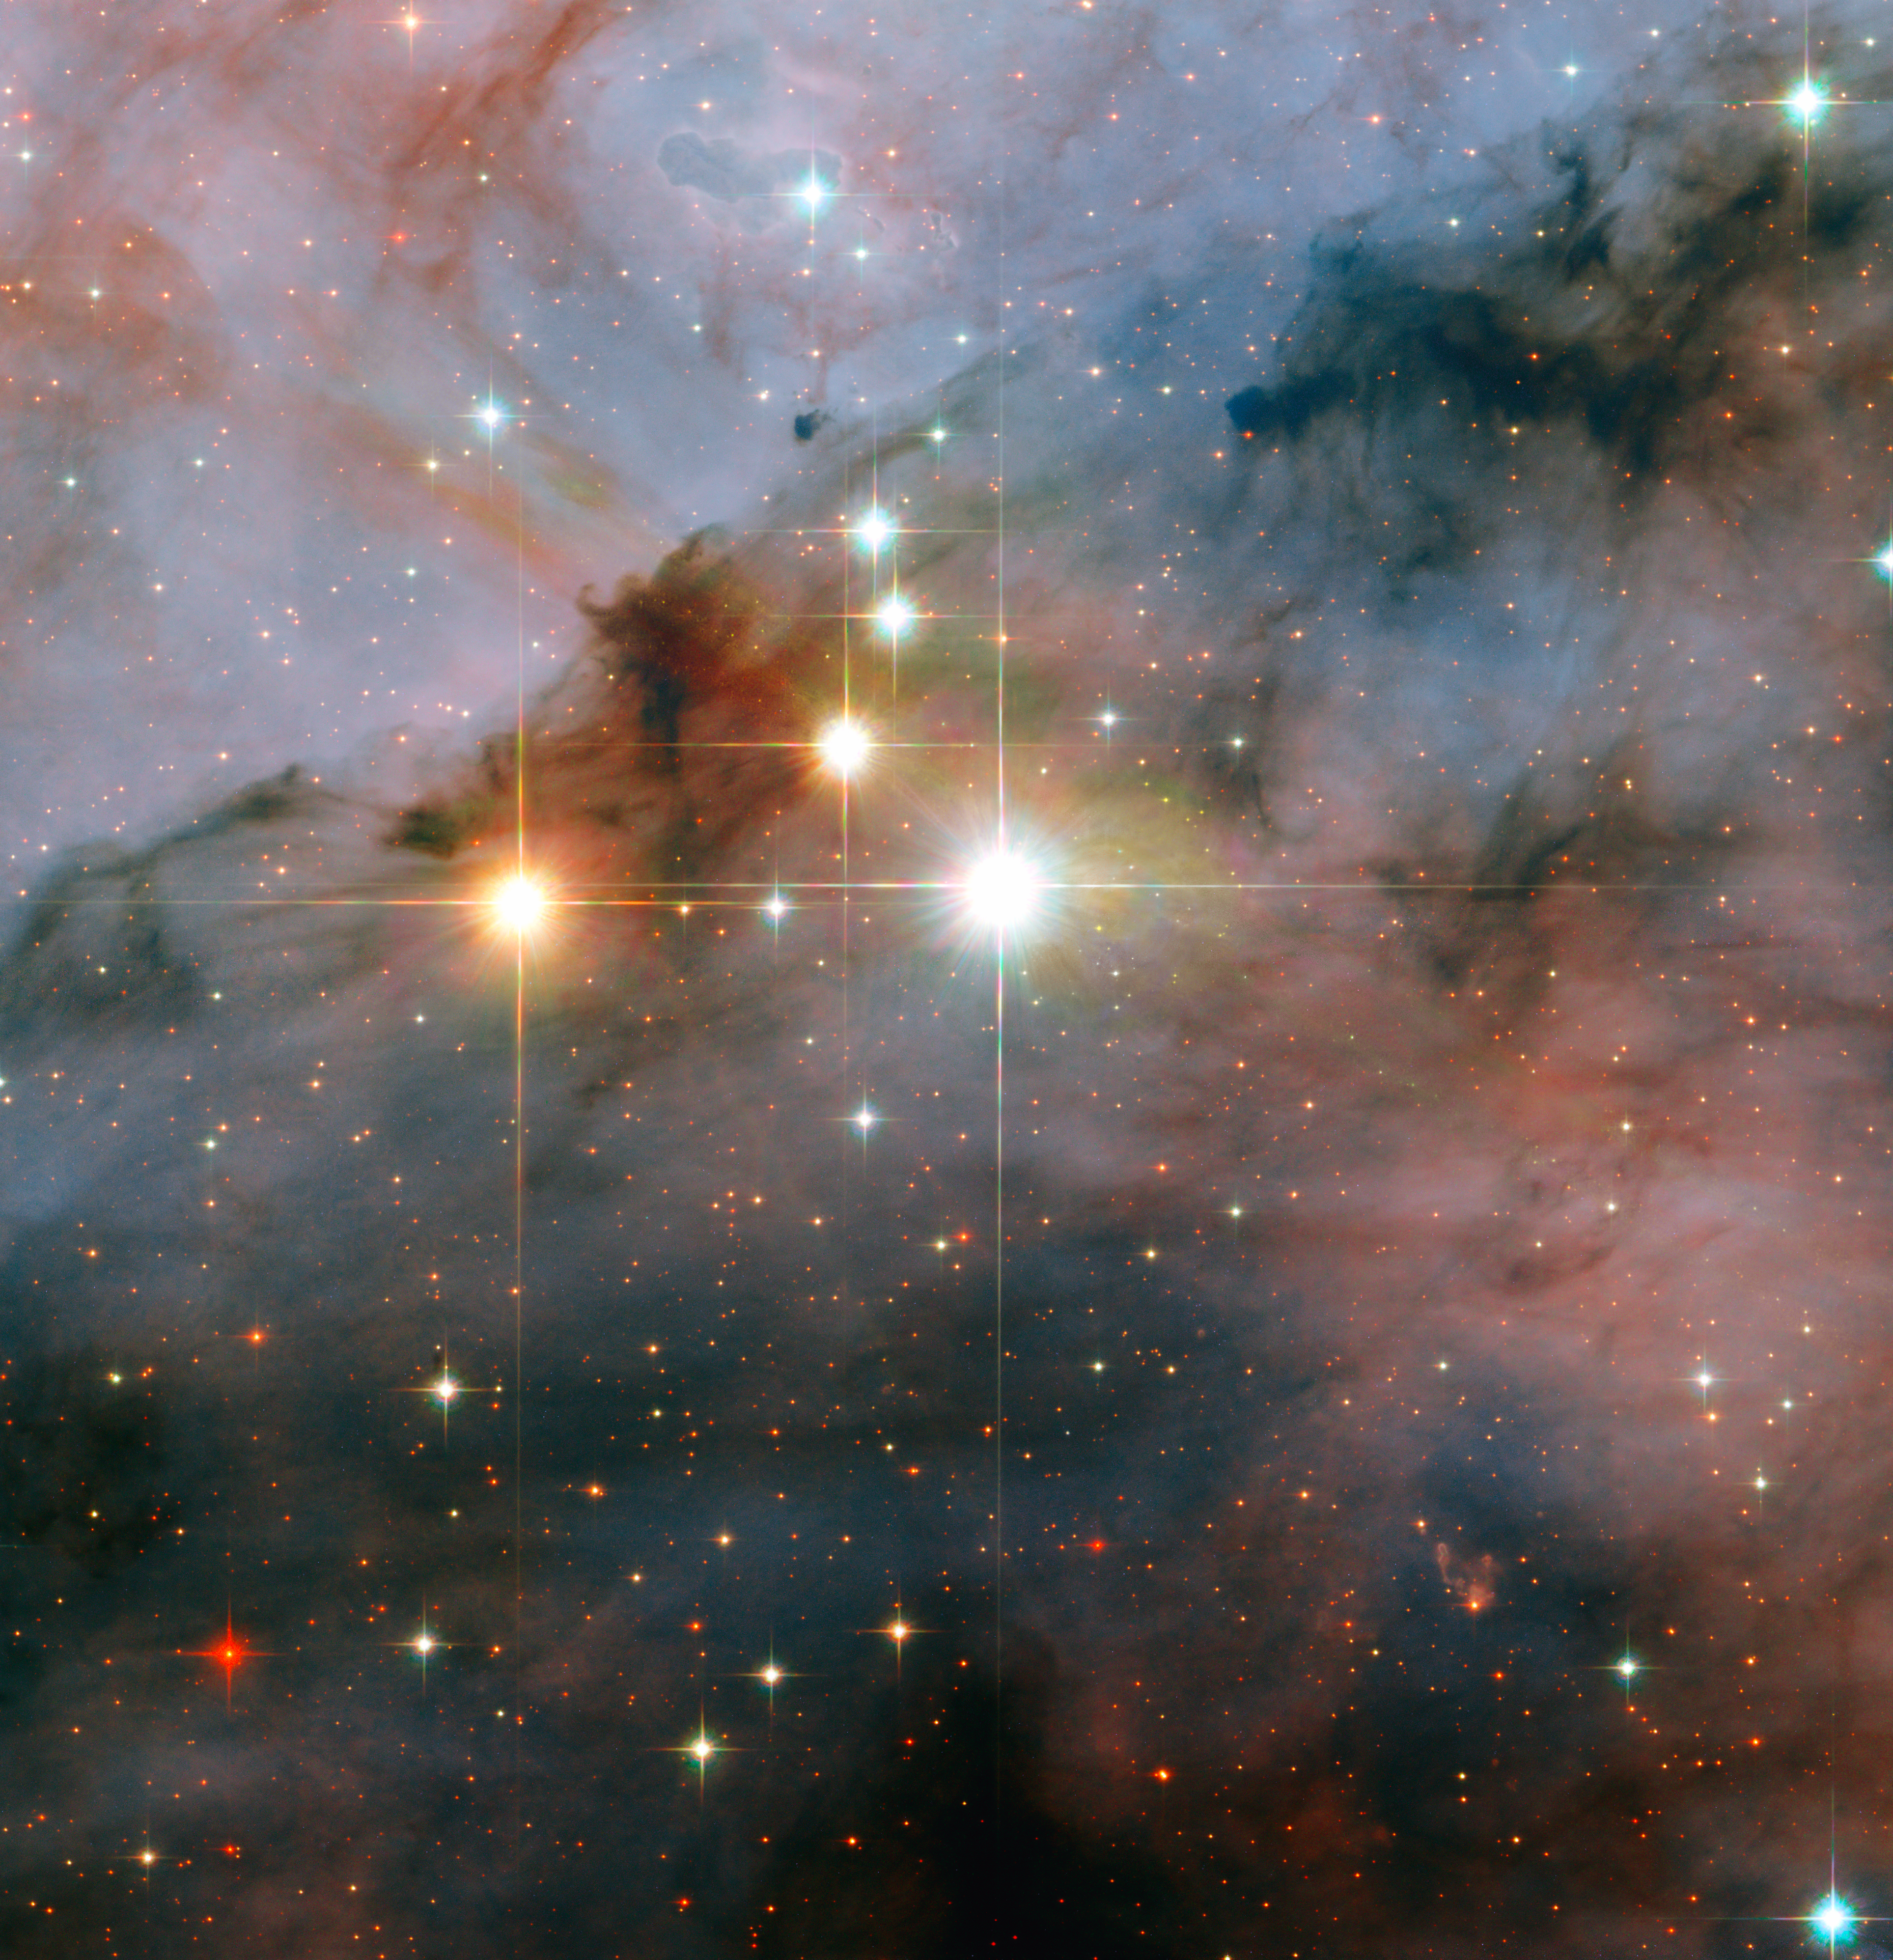

Mammoth stars seen by Hubble

The image shows a pair of colossal stars, WR 25 and Tr16-244, located within the open cluster Trumpler 16. This cluster is embedded within the Carina Nebula, an immense cauldron of gas and dust that lies approximately 7500 light-years from Earth in the constellation of Carina, the Keel. WR 25 is the brightest, situated near the centre of the image. The neighbouring Tr16-244 is the third brightest, just to the upper left of WR 25. The second brightest, to the left of WR 25, is a low mass star located much closer to the Earth than the Carina Nebula.

Credit: NASA, ESA and Jesús Maíz Apellániz (Instituto de Astrofísica de Andalucía, Spain)